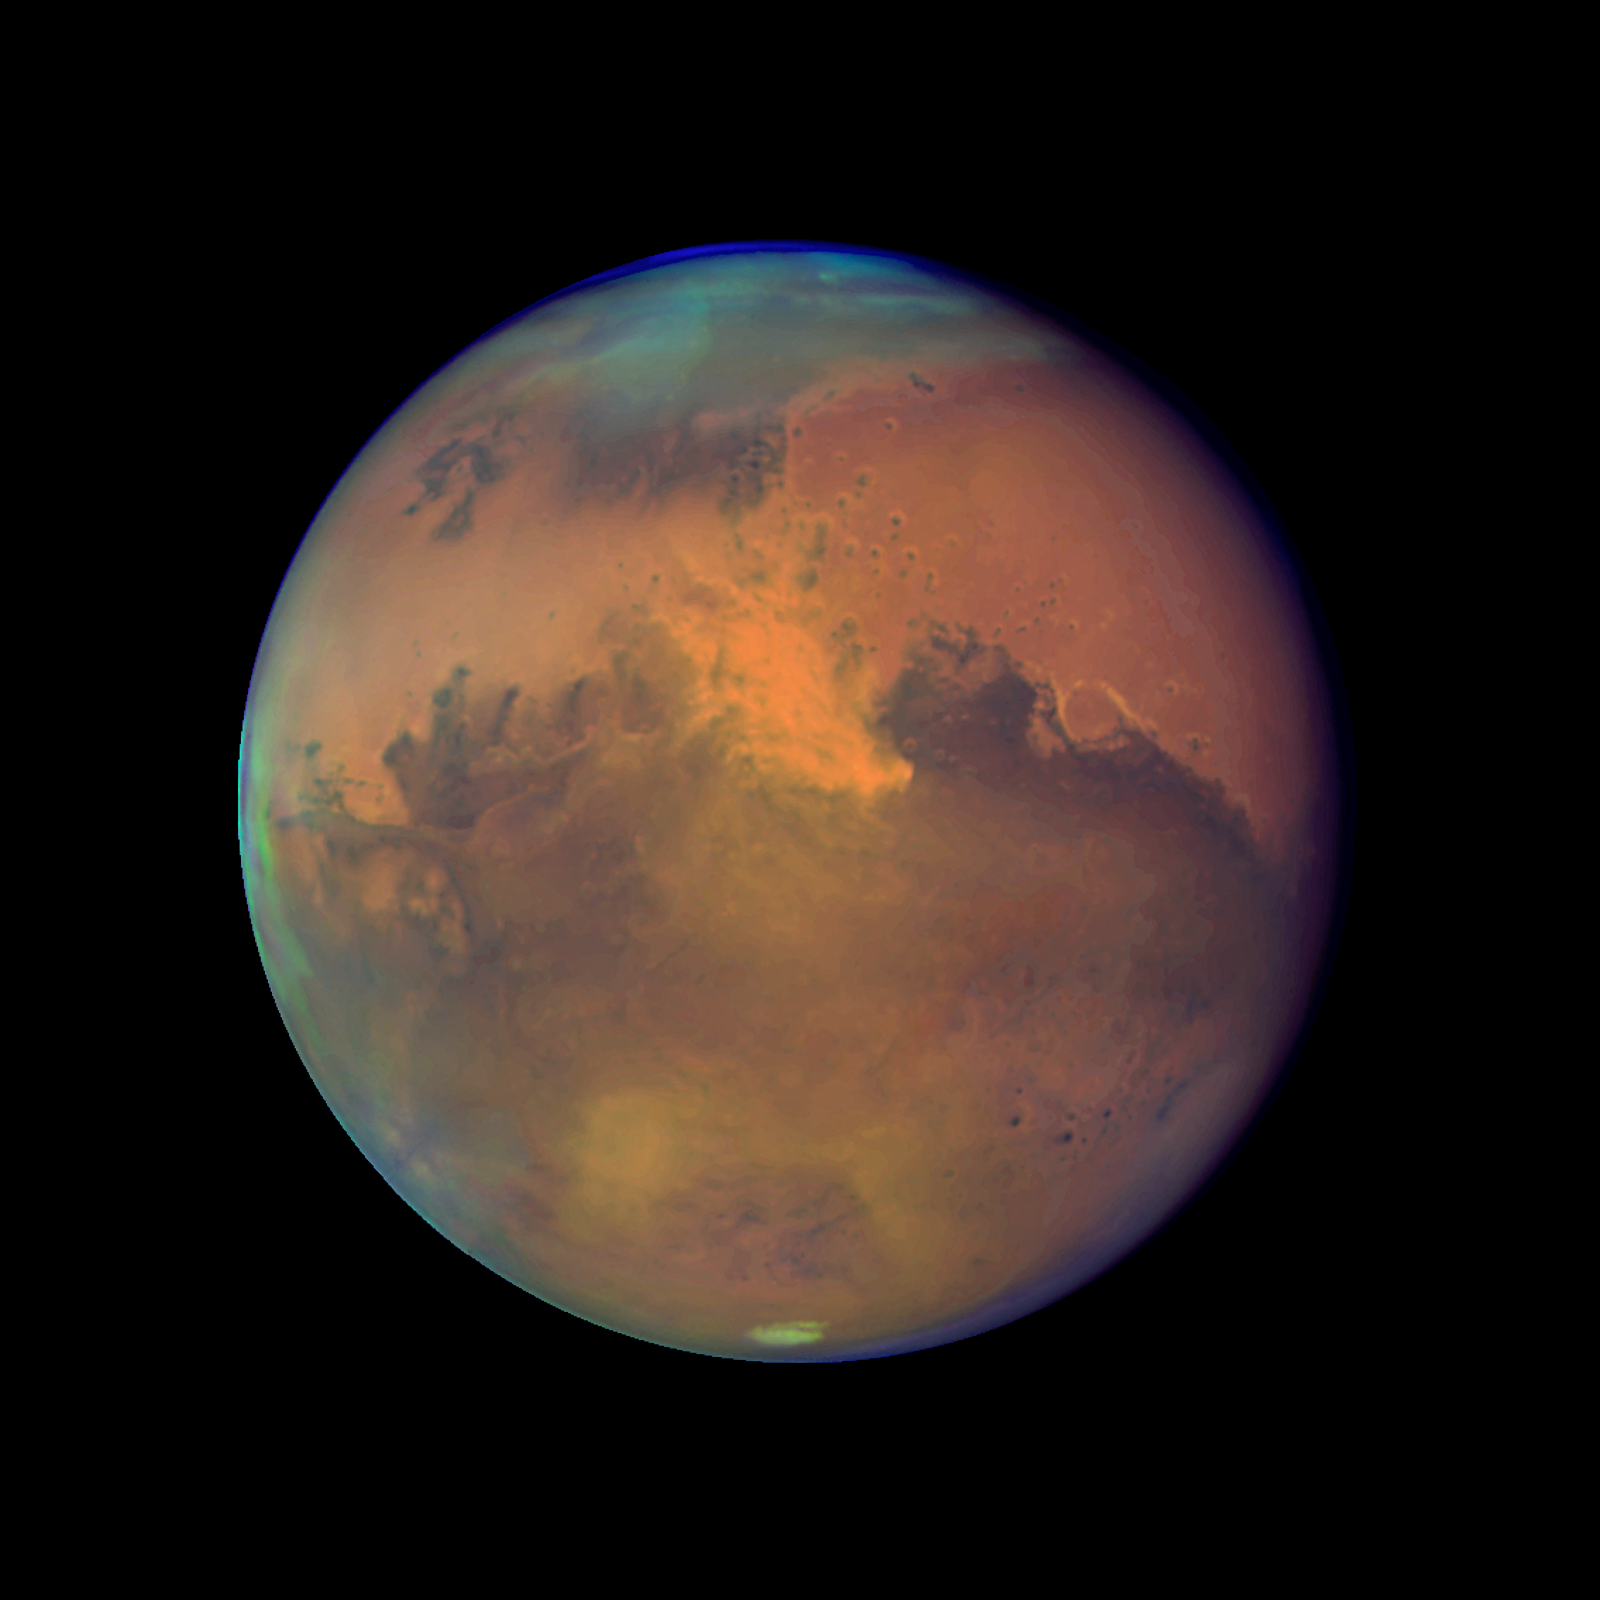

Mars Near Opposition 1995-2005: 2005

NASA's Hubble Space Telescope snapped this picture of Mars on October 28, within a day of its closest approach to Earth on the night of October 29. The large regional dust storm appears as the brighter, redder cloudy region in the middle of the planet's disk.

Credit: NASA, ESA, and The Hubble Heritage Team (STScI/AURA)